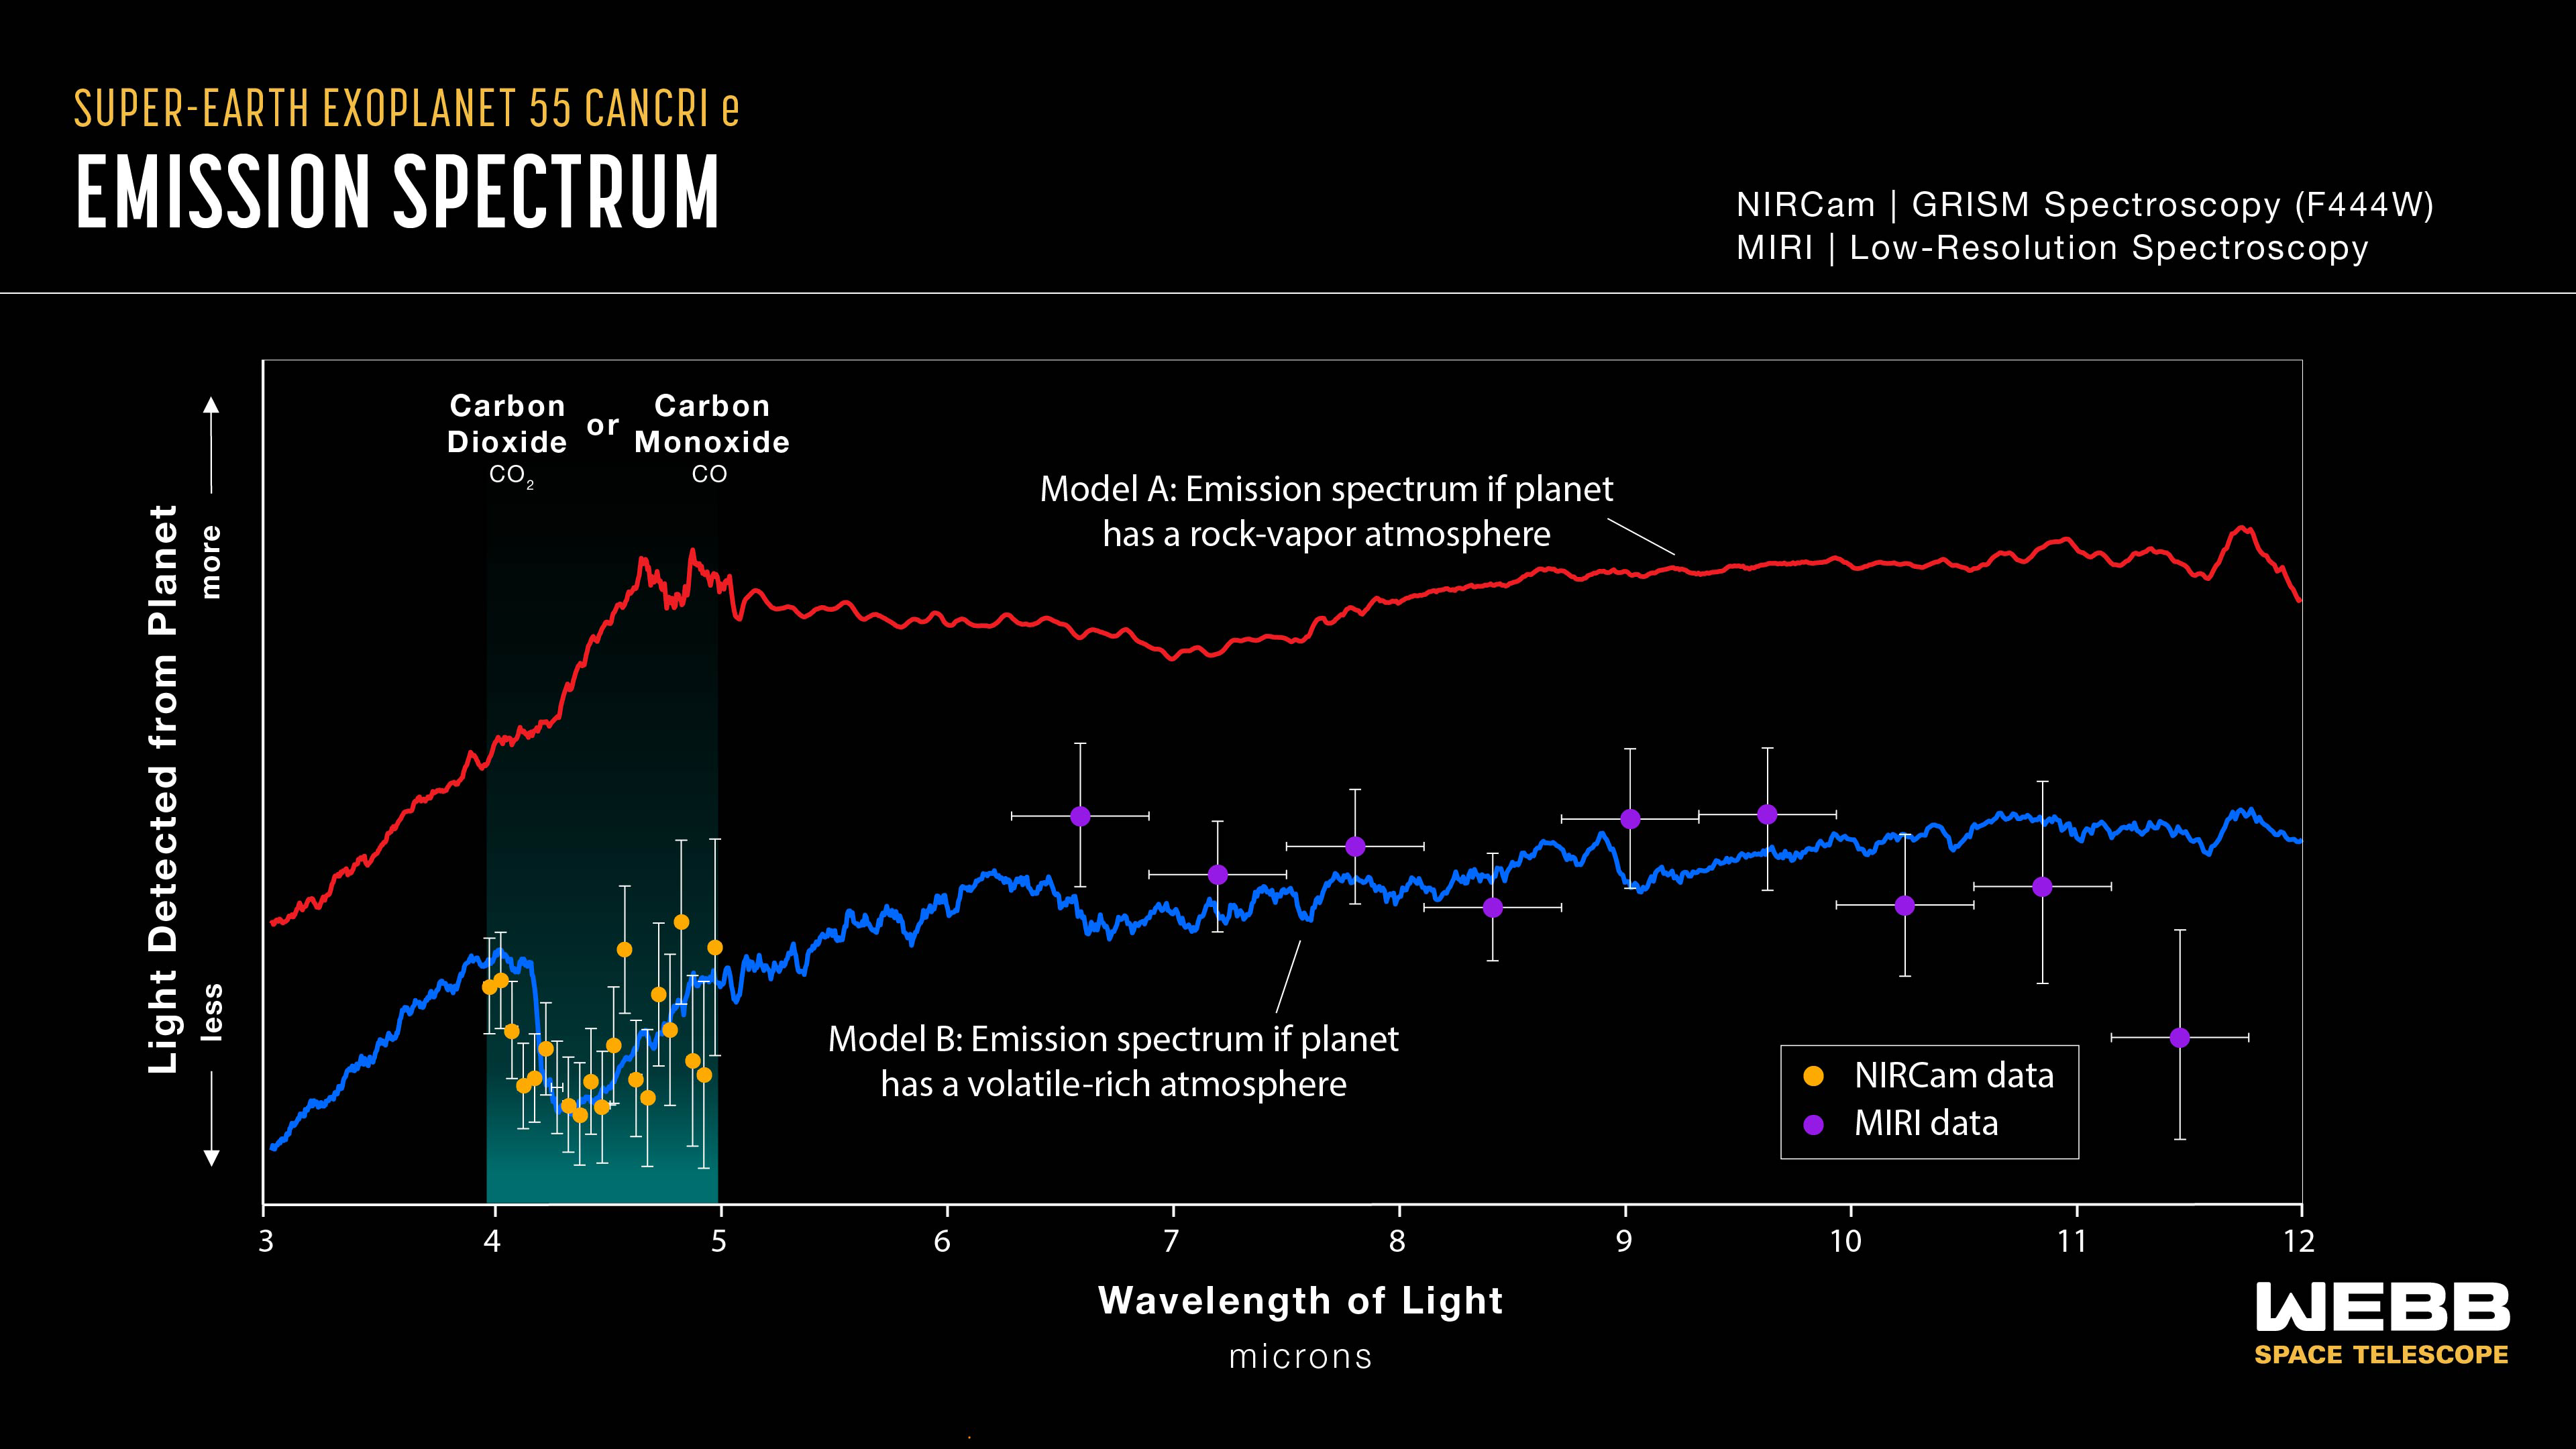

Super-Earth exoplanet 55 Cancri e (emission spectrum)

A thermal emission spectrum captured by Webb’s NIRCam (Near-Infrared Camera) in November 2022, and MIRI (Mid-Infrared Instrument) in March 2023, shows the brightness (y-axis) of different wavelengths of infrared light (x-axis) emitted by the super-Earth exoplanet 55 Cancri e. The spectrum shows that the planet may be surrounded by an atmosphere rich in carbon dioxide or carbon monoxide and other volatiles, not just vaporised rock.

The graph compares data collected by NIRCam (orange dots) and MIRI (purple dots) to two different models. Model A, in red, shows what the emission spectrum of 55 Cancri e should look like if it has an atmosphere made of vaporised rock. Model B, in blue, shows what the emission spectrum should look like if the planet has a volatile-rich atmosphere outgassed from a magma ocean that has a volatile content similar to Earth’s mantle. Both MIRI and NIRCam data are consistent with the volatile-rich model.

The amount of mid-infrared light emitted by the planet (MIRI) shows that its dayside temperature is significantly lower than it would be if it did not have an atmosphere to distribute heat from the dayside to the nightside. The dip in the spectrum between 4 and 5 microns (NIRCam data) can be explained by absorption of those wavelengths by carbon monoxide or carbon dioxide molecules in the atmosphere.

The spectrum was made by measuring the brightness of 4- to 5-micron light with Webb’s NIRCam GRISM spectrometer, and 5- to 12-micron light with the MIRI low-resolution spectrometer, before, during and after the planet moved behind its star (the secondary eclipse ). The amount of each wavelength emitted by the planet (y-axis) was calculated by subtracting the brightness of the star alone (during the secondary eclipse) from the brightness of the star and planet combined (before and after the eclipse). Each observation lasted about eight hours.

Note that the NIRCam data have been shifted vertically to align with Model B. Although the differences in brightness between each wavelength in the NIRCam band were derived from the observation (the data suggest a valley between 4 and 5 microns), the absolute brightness (the vertical position of that valley) could not be measured precisely because of noise in the data.

Credit: NASA, ESA, CSA, J. Olmsted (STScI), R. Hu (JPL), A. Bello-Arufe (JPL), M. Zhang (University of Chicago), M. Zilinskas (SRON Netherlands Institute for Space Research)